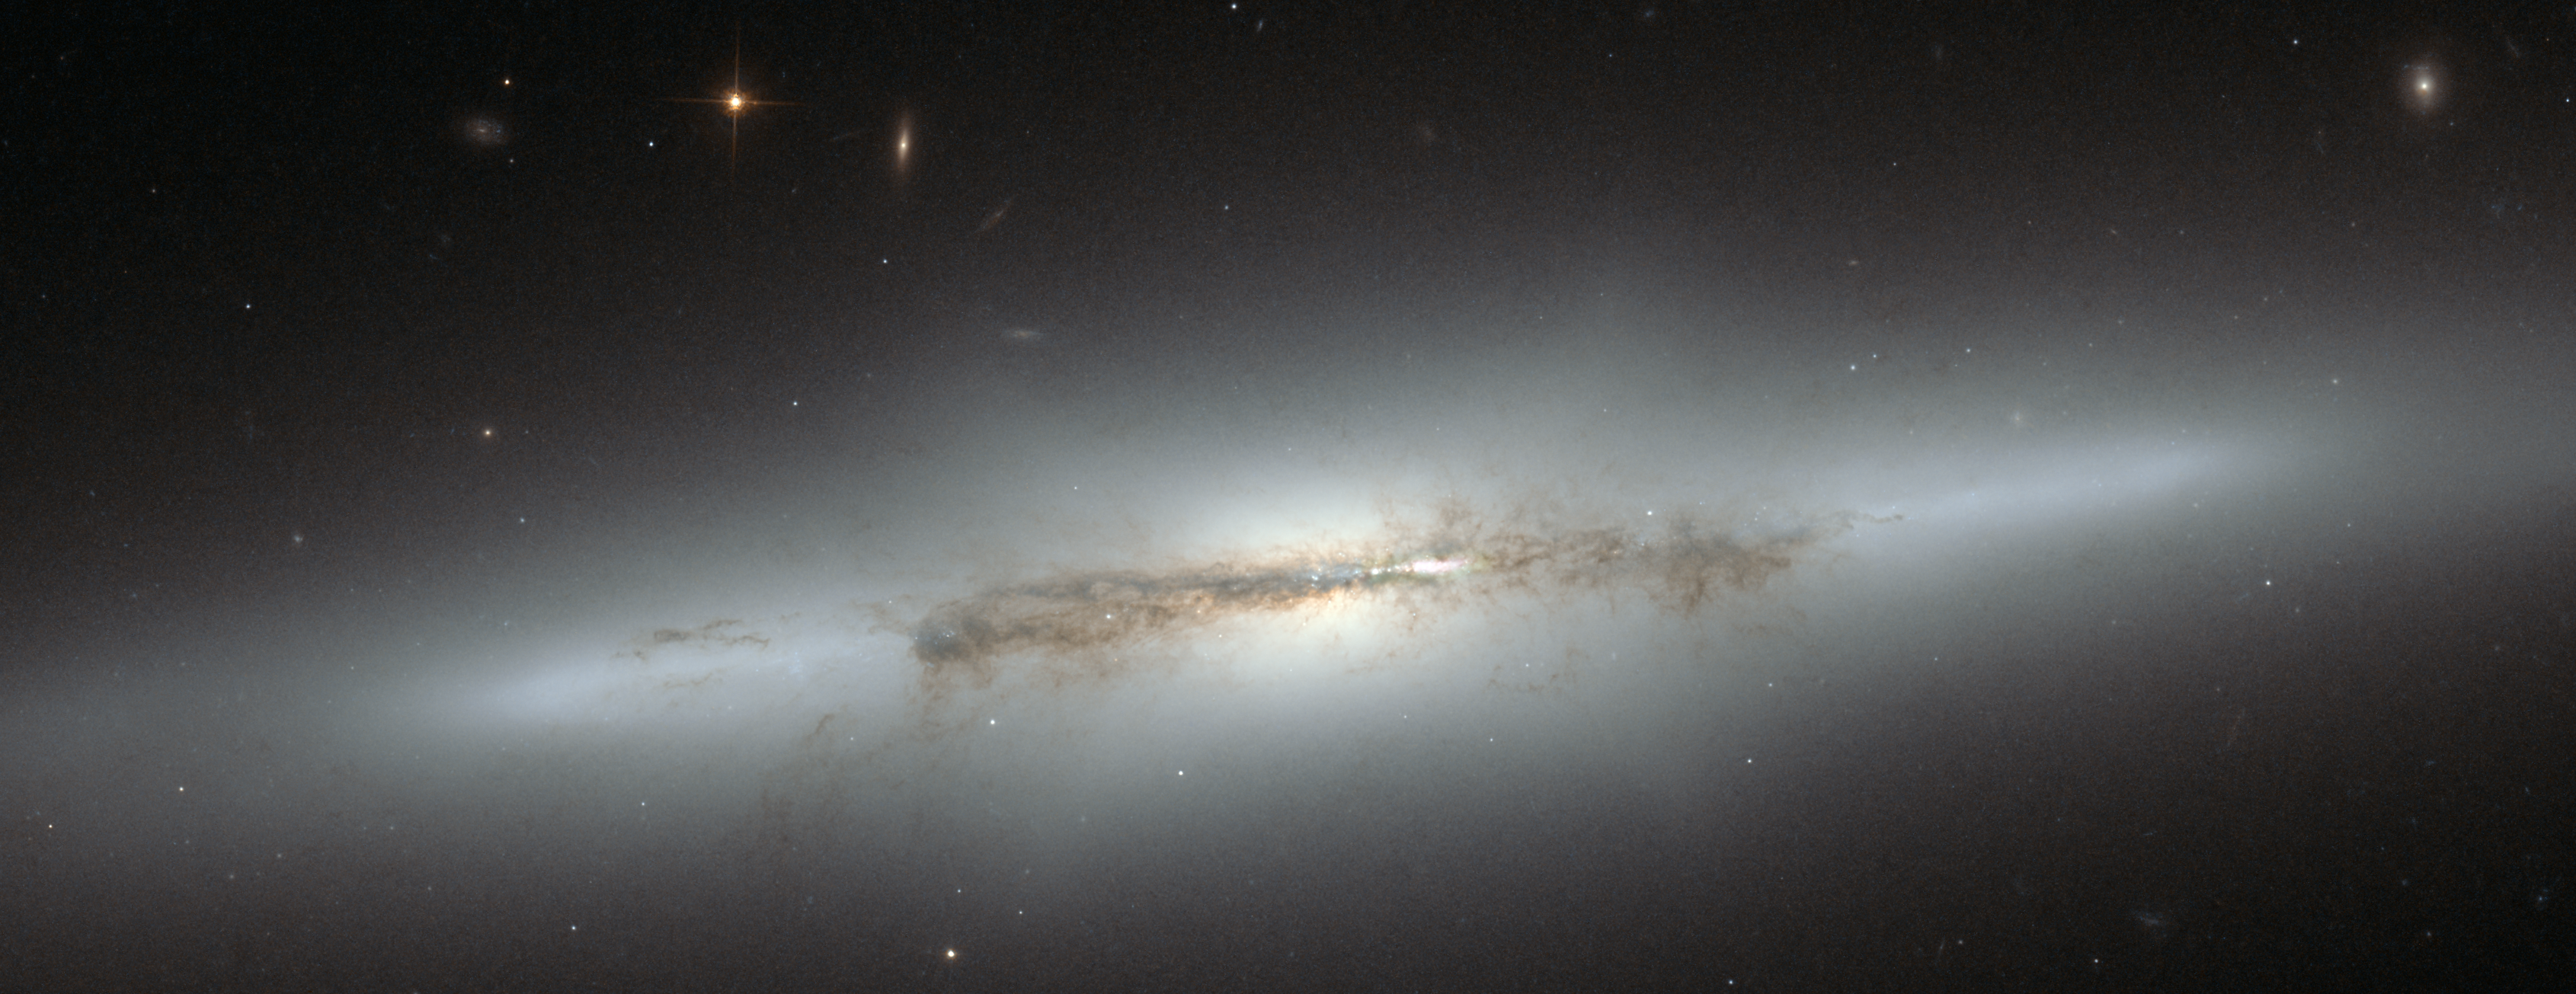

Hubble looks at sideways NGC 4710 (crop)

Still an astrophysical mystery, the evolution of the bulges in spiral galaxies led astronomers to the edge-on galaxy NGC 4710. When staring directly at the centre of the galaxy, one can detect a faint, ethereal "X"-shaped structure. Such a feature, which astronomers call a "boxy" or "peanut-shaped" bulge, is due to the vertical motions of the stars in the galaxy's bar and is only evident when the galaxy is seen edge-on. This curiously shaped puff is often observed in spiral galaxies with small bulges and open arms, but is less common in spirals with arms tightly wrapped around a more prominent bulge, such as NGC 4710.

Credit: NASA & ESA